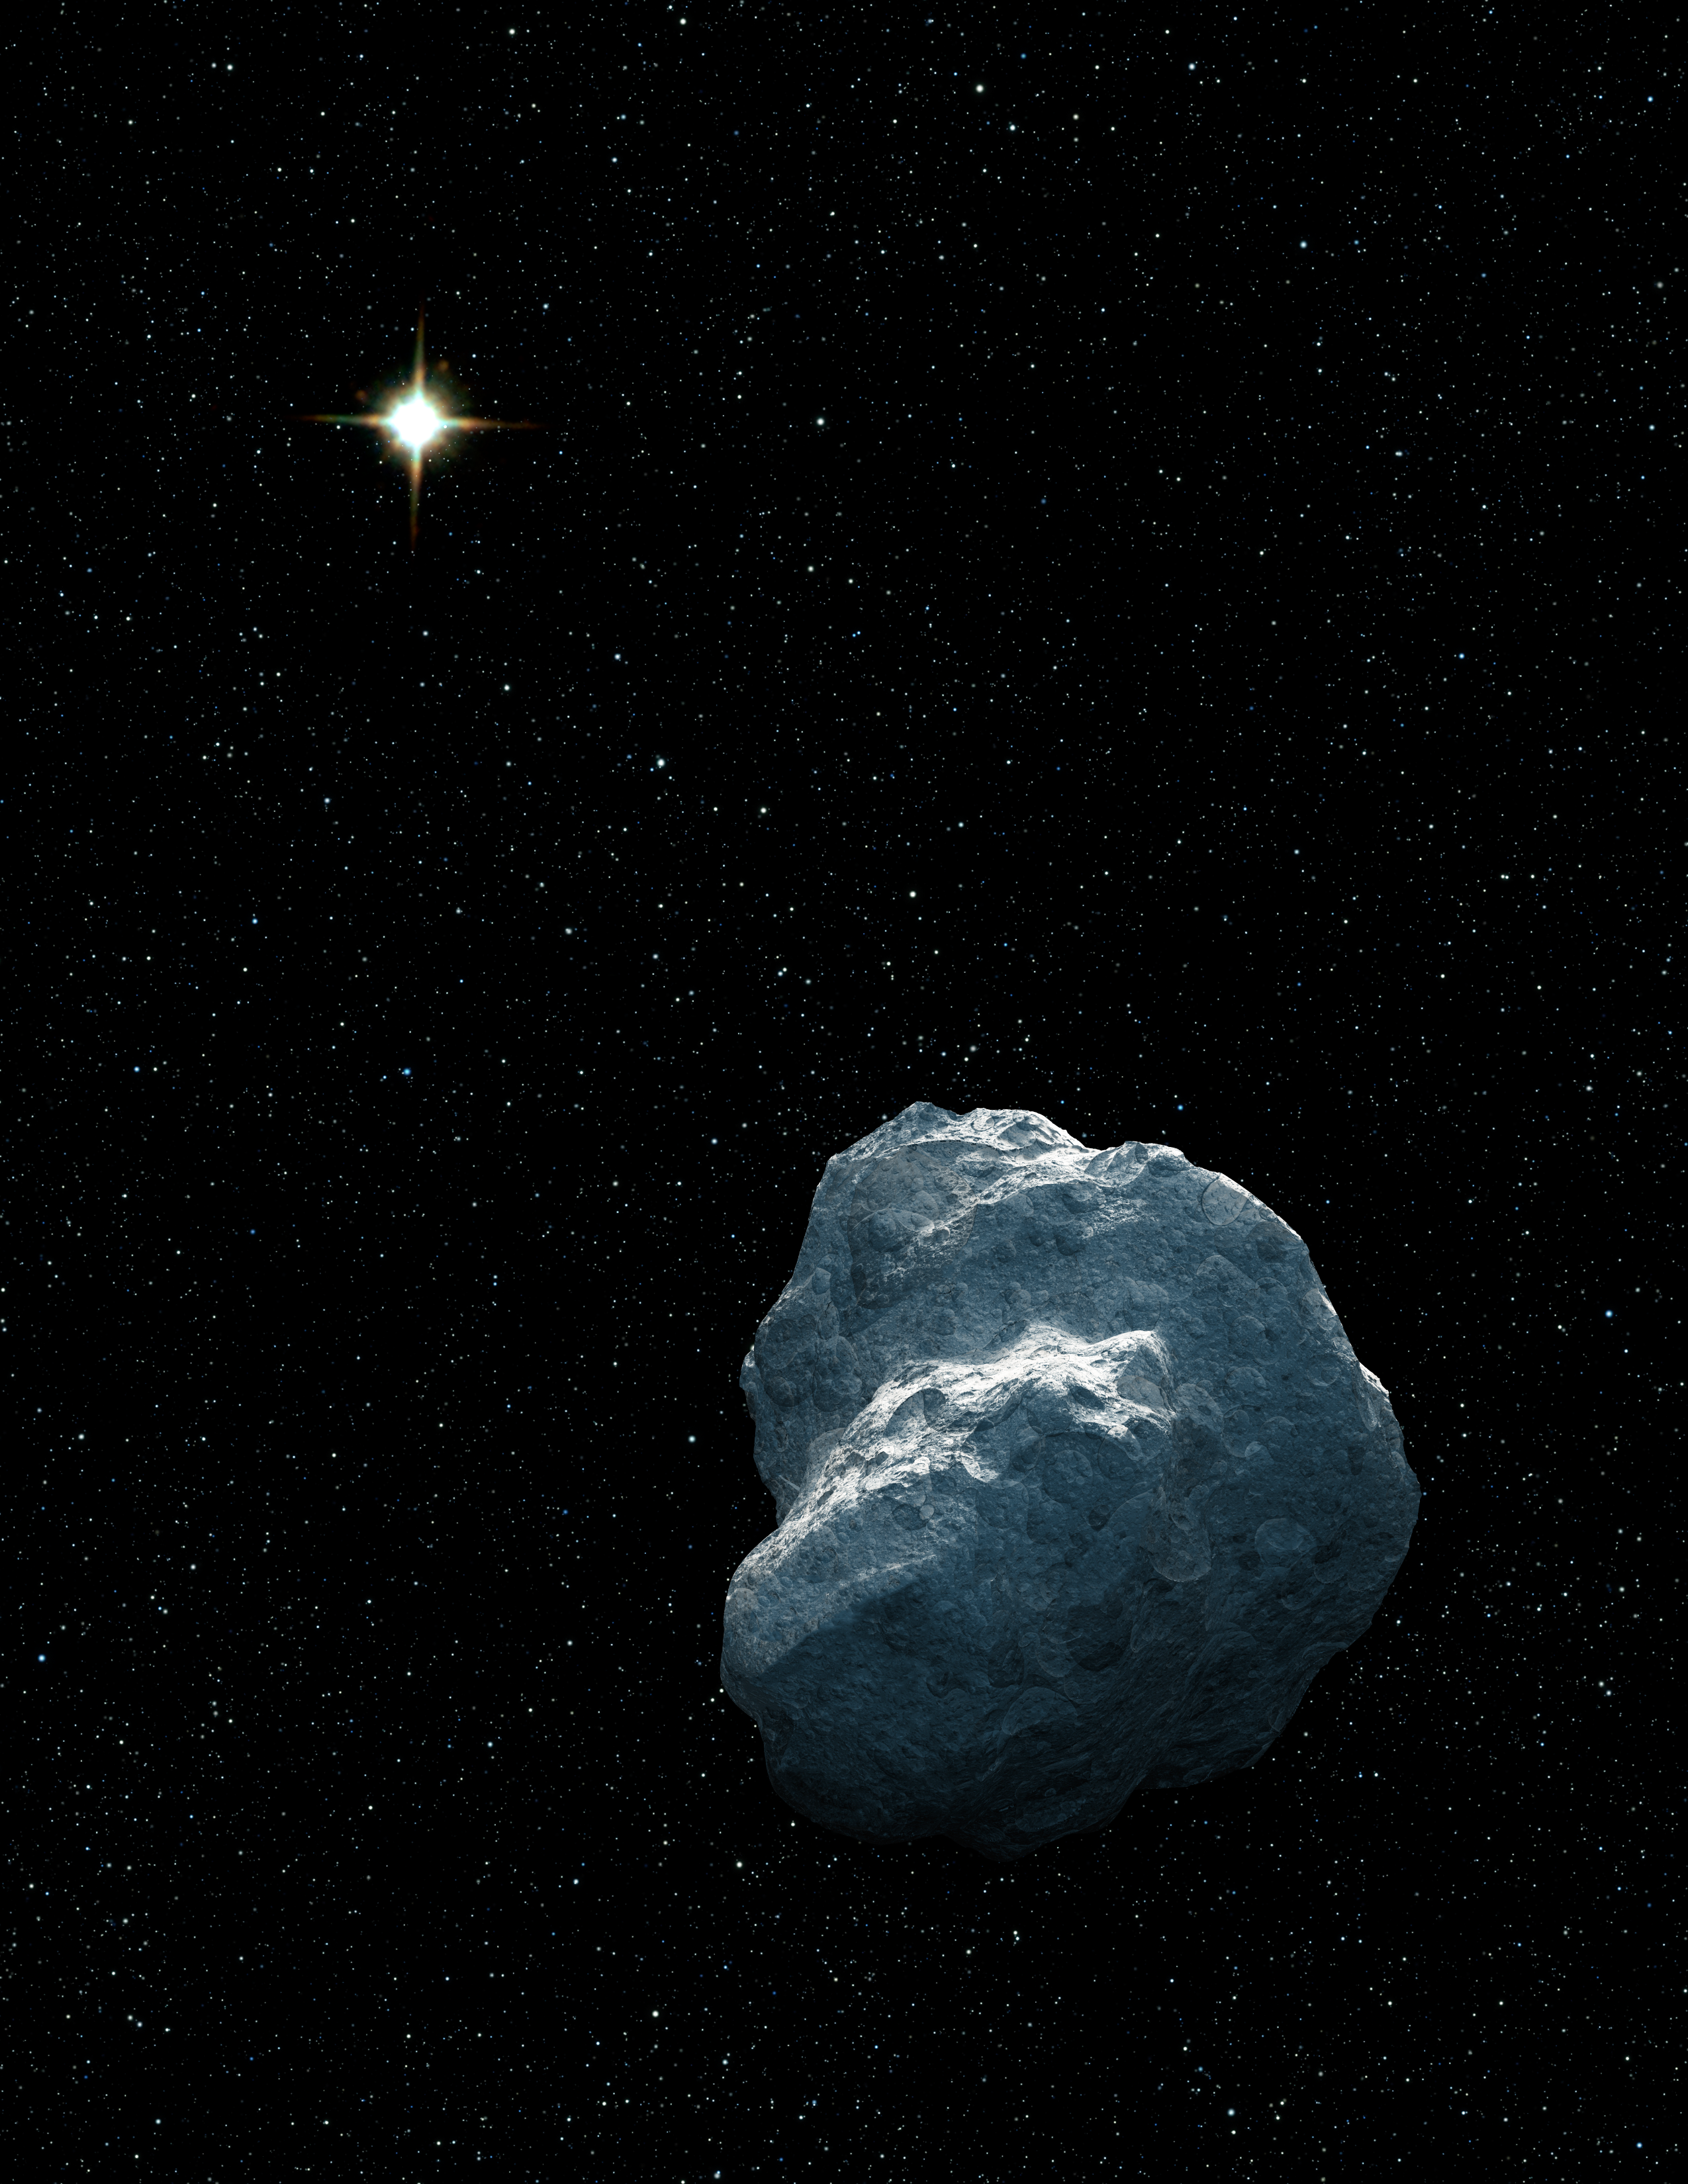

Trans-Neptunian Object (artist's impression)

This is an artist's concept of a craggy piece of solar system debris that belongs to a class of bodies called trans-Neptunian objects (TNOs). Most TNOs are small and faint, making them difficult to spot. Generally, they are more than 100 million times fainter than objects visible to the unaided eye. The newfound TNOs range from 40 to 100 kilometres across. In this illustration, the distant Sun is reduced to a bright star at a distance of about 5 billion kilometres. Astronomers culling the data archives of the NASA/ESA Hubble Space Telescope have added 14 new TNOs to the catalog. Their search method promises to turn up hundreds more.

Credit: NASA, ESA, and G. Bacon (STScI). Science Credit: NASA, ESA, and C. Fuentes (Harvard-Smithsonian Center for Astrophysics)